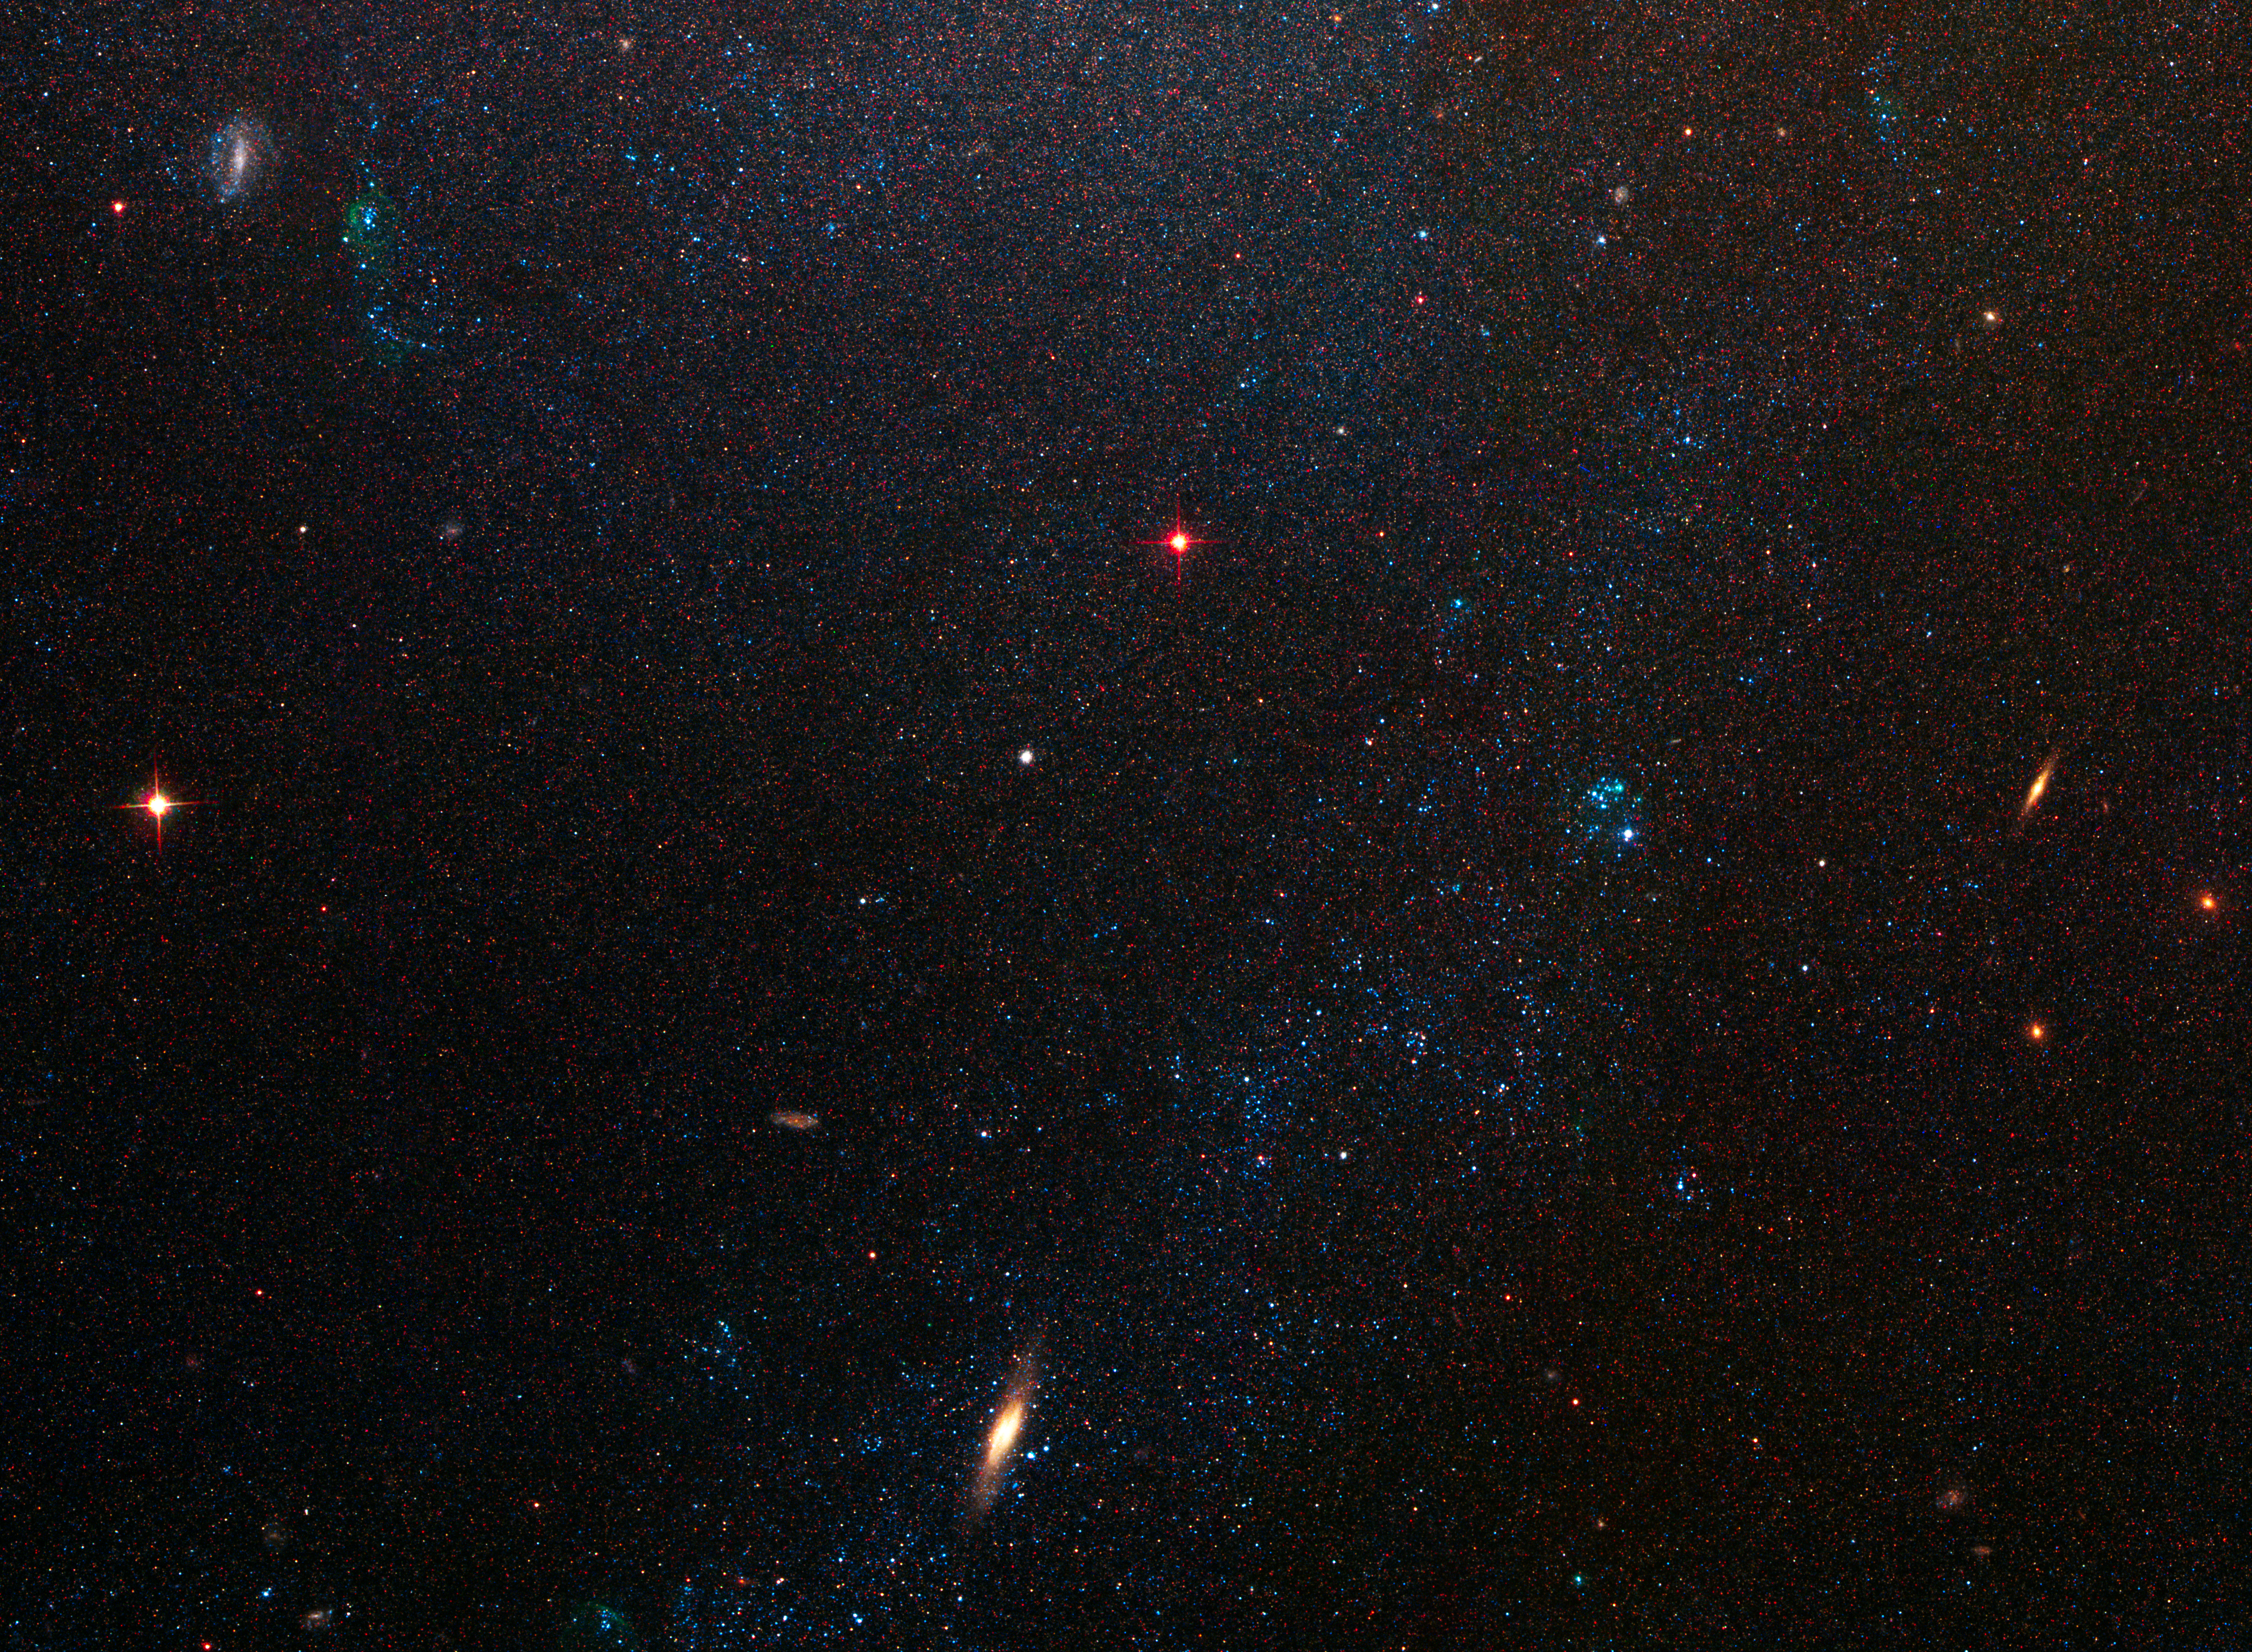

Spiral Galaxy M81 Details 6

Southern extremity of the galaxy M81.

Credit: NASA, ESA and the Hubble Heritage Team (STScI/AURA). Acknowledgment: A. Zezas and J. Huchra (Harvard-Smithsonian Center for Astrophysics)